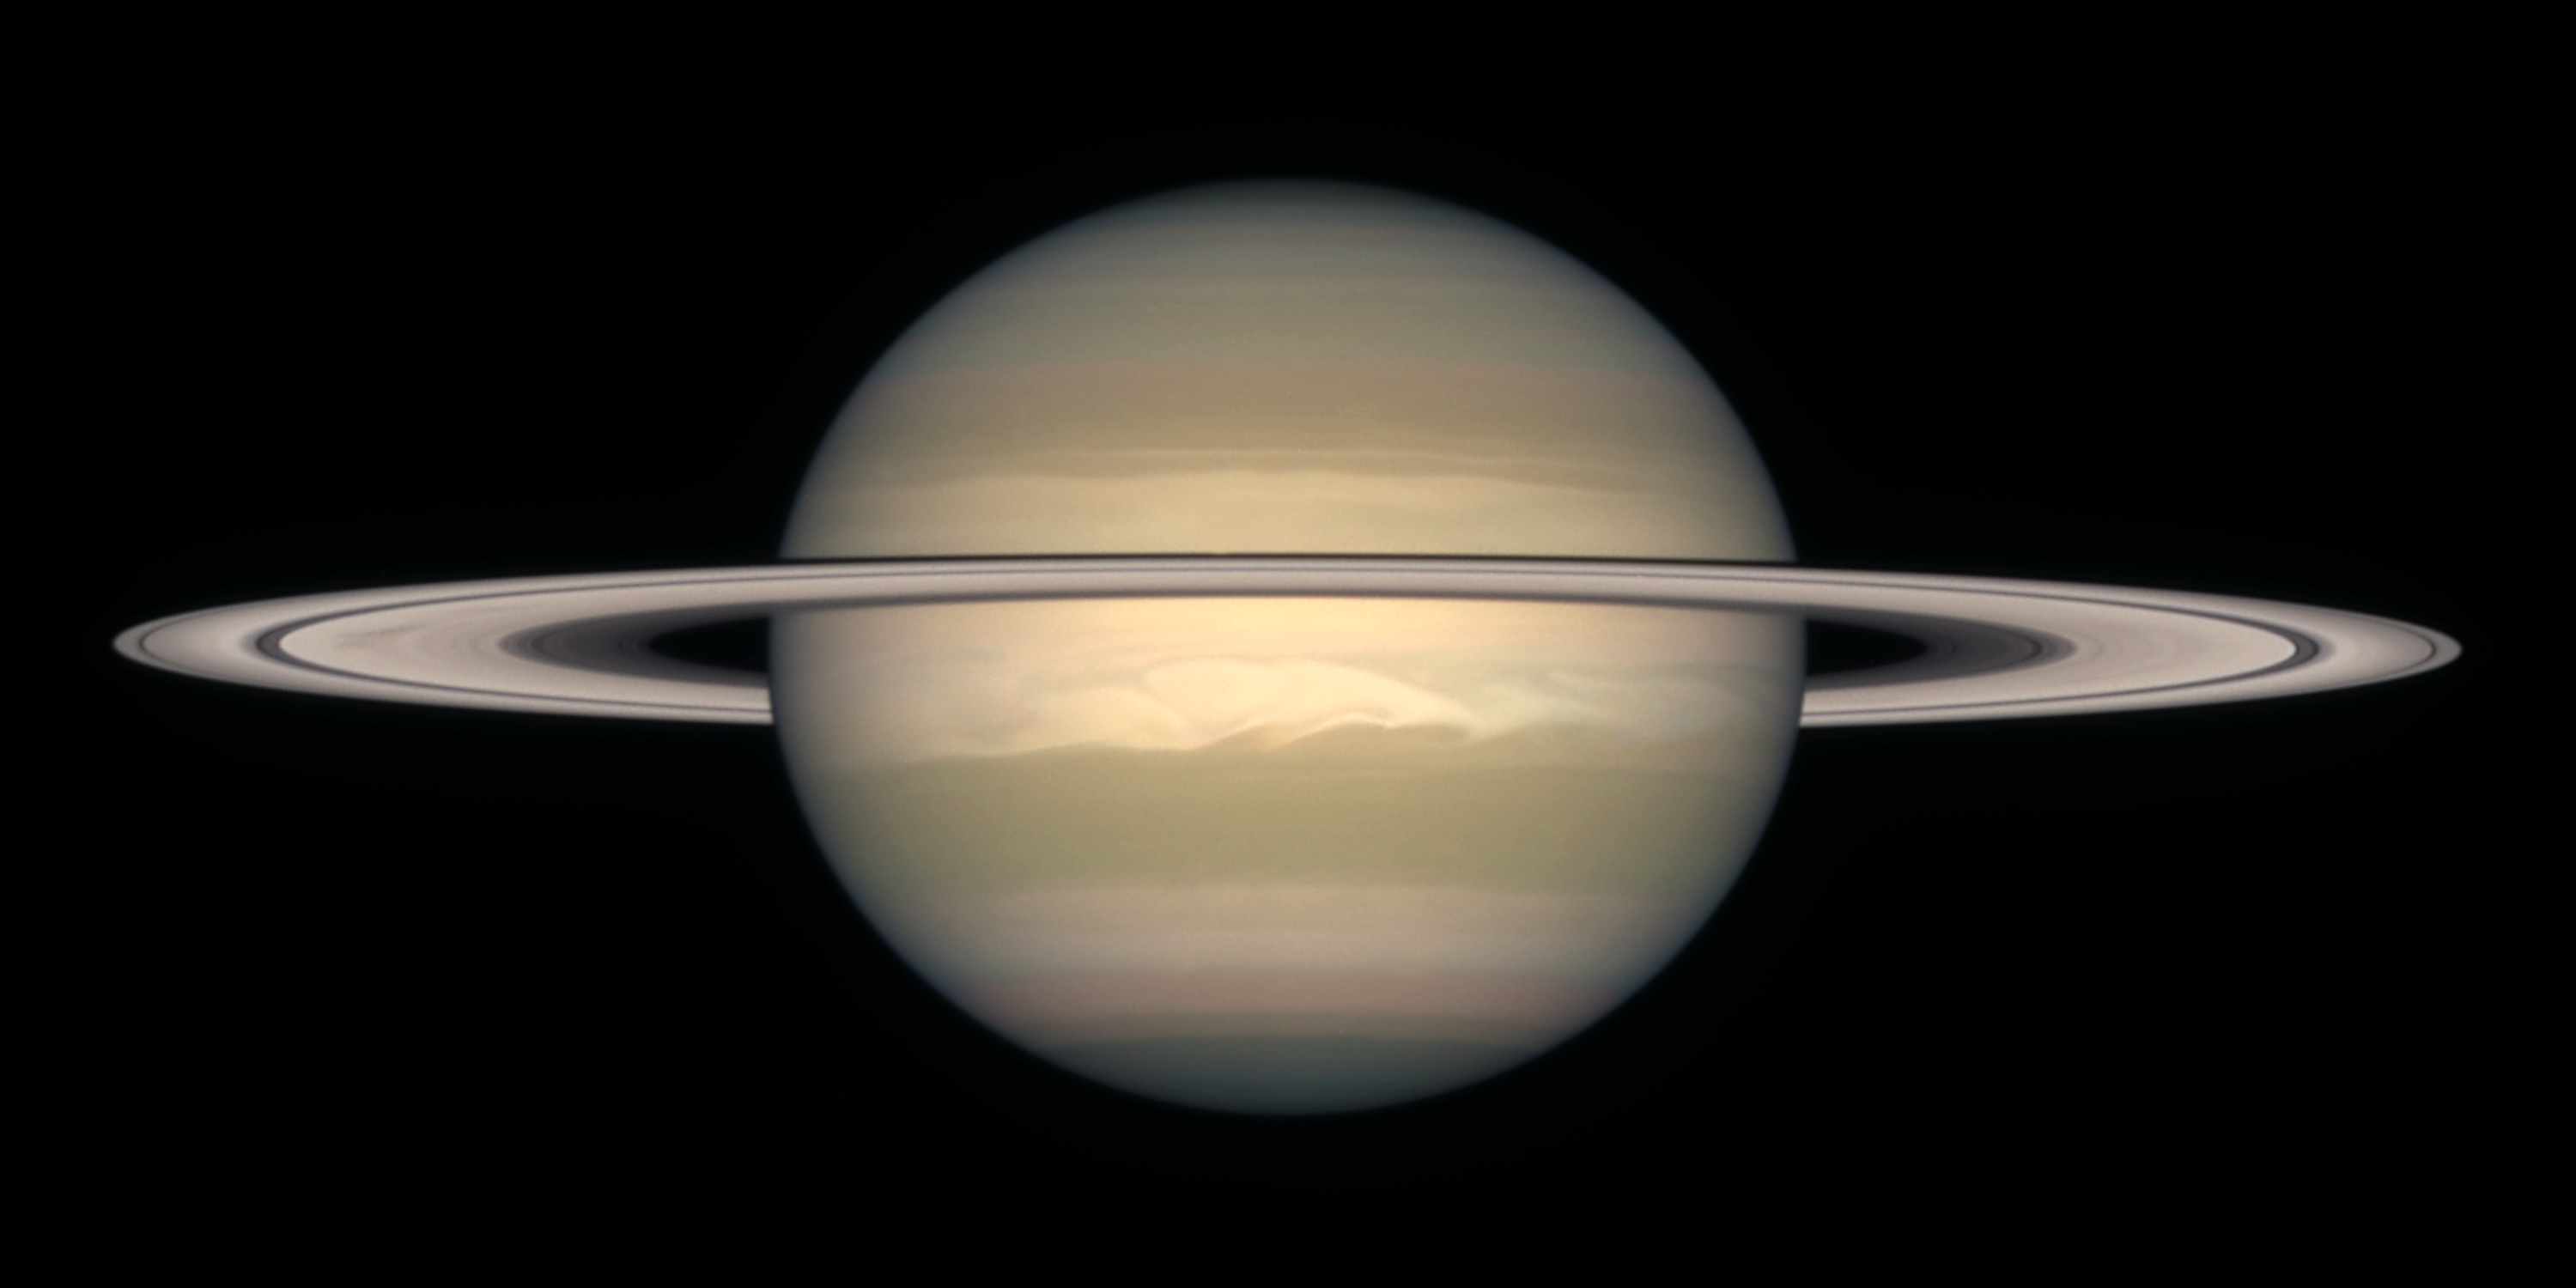

Saturn on October 1996

Saturn is about 75, 000 miles (120, 000 km) across, and is flattened at the poles because of its very rapid rotation. A day is only 10 hours long on Saturn. Strong winds account for the horizontal bands in the atmosphere of this giant gas planet.

The delicate colour variations in the clouds are due to smog in the upper atmosphere, produced when ultraviolet radiation from the Sun shines on methane gas. Deeper in the atmosphere, the visible clouds and gases merge gradually into hotter and denser gases, with no solid surface for visiting spacecraft to land on.

Credit: NASA/ESA and The Hubble Heritage Team STScI/AURA)